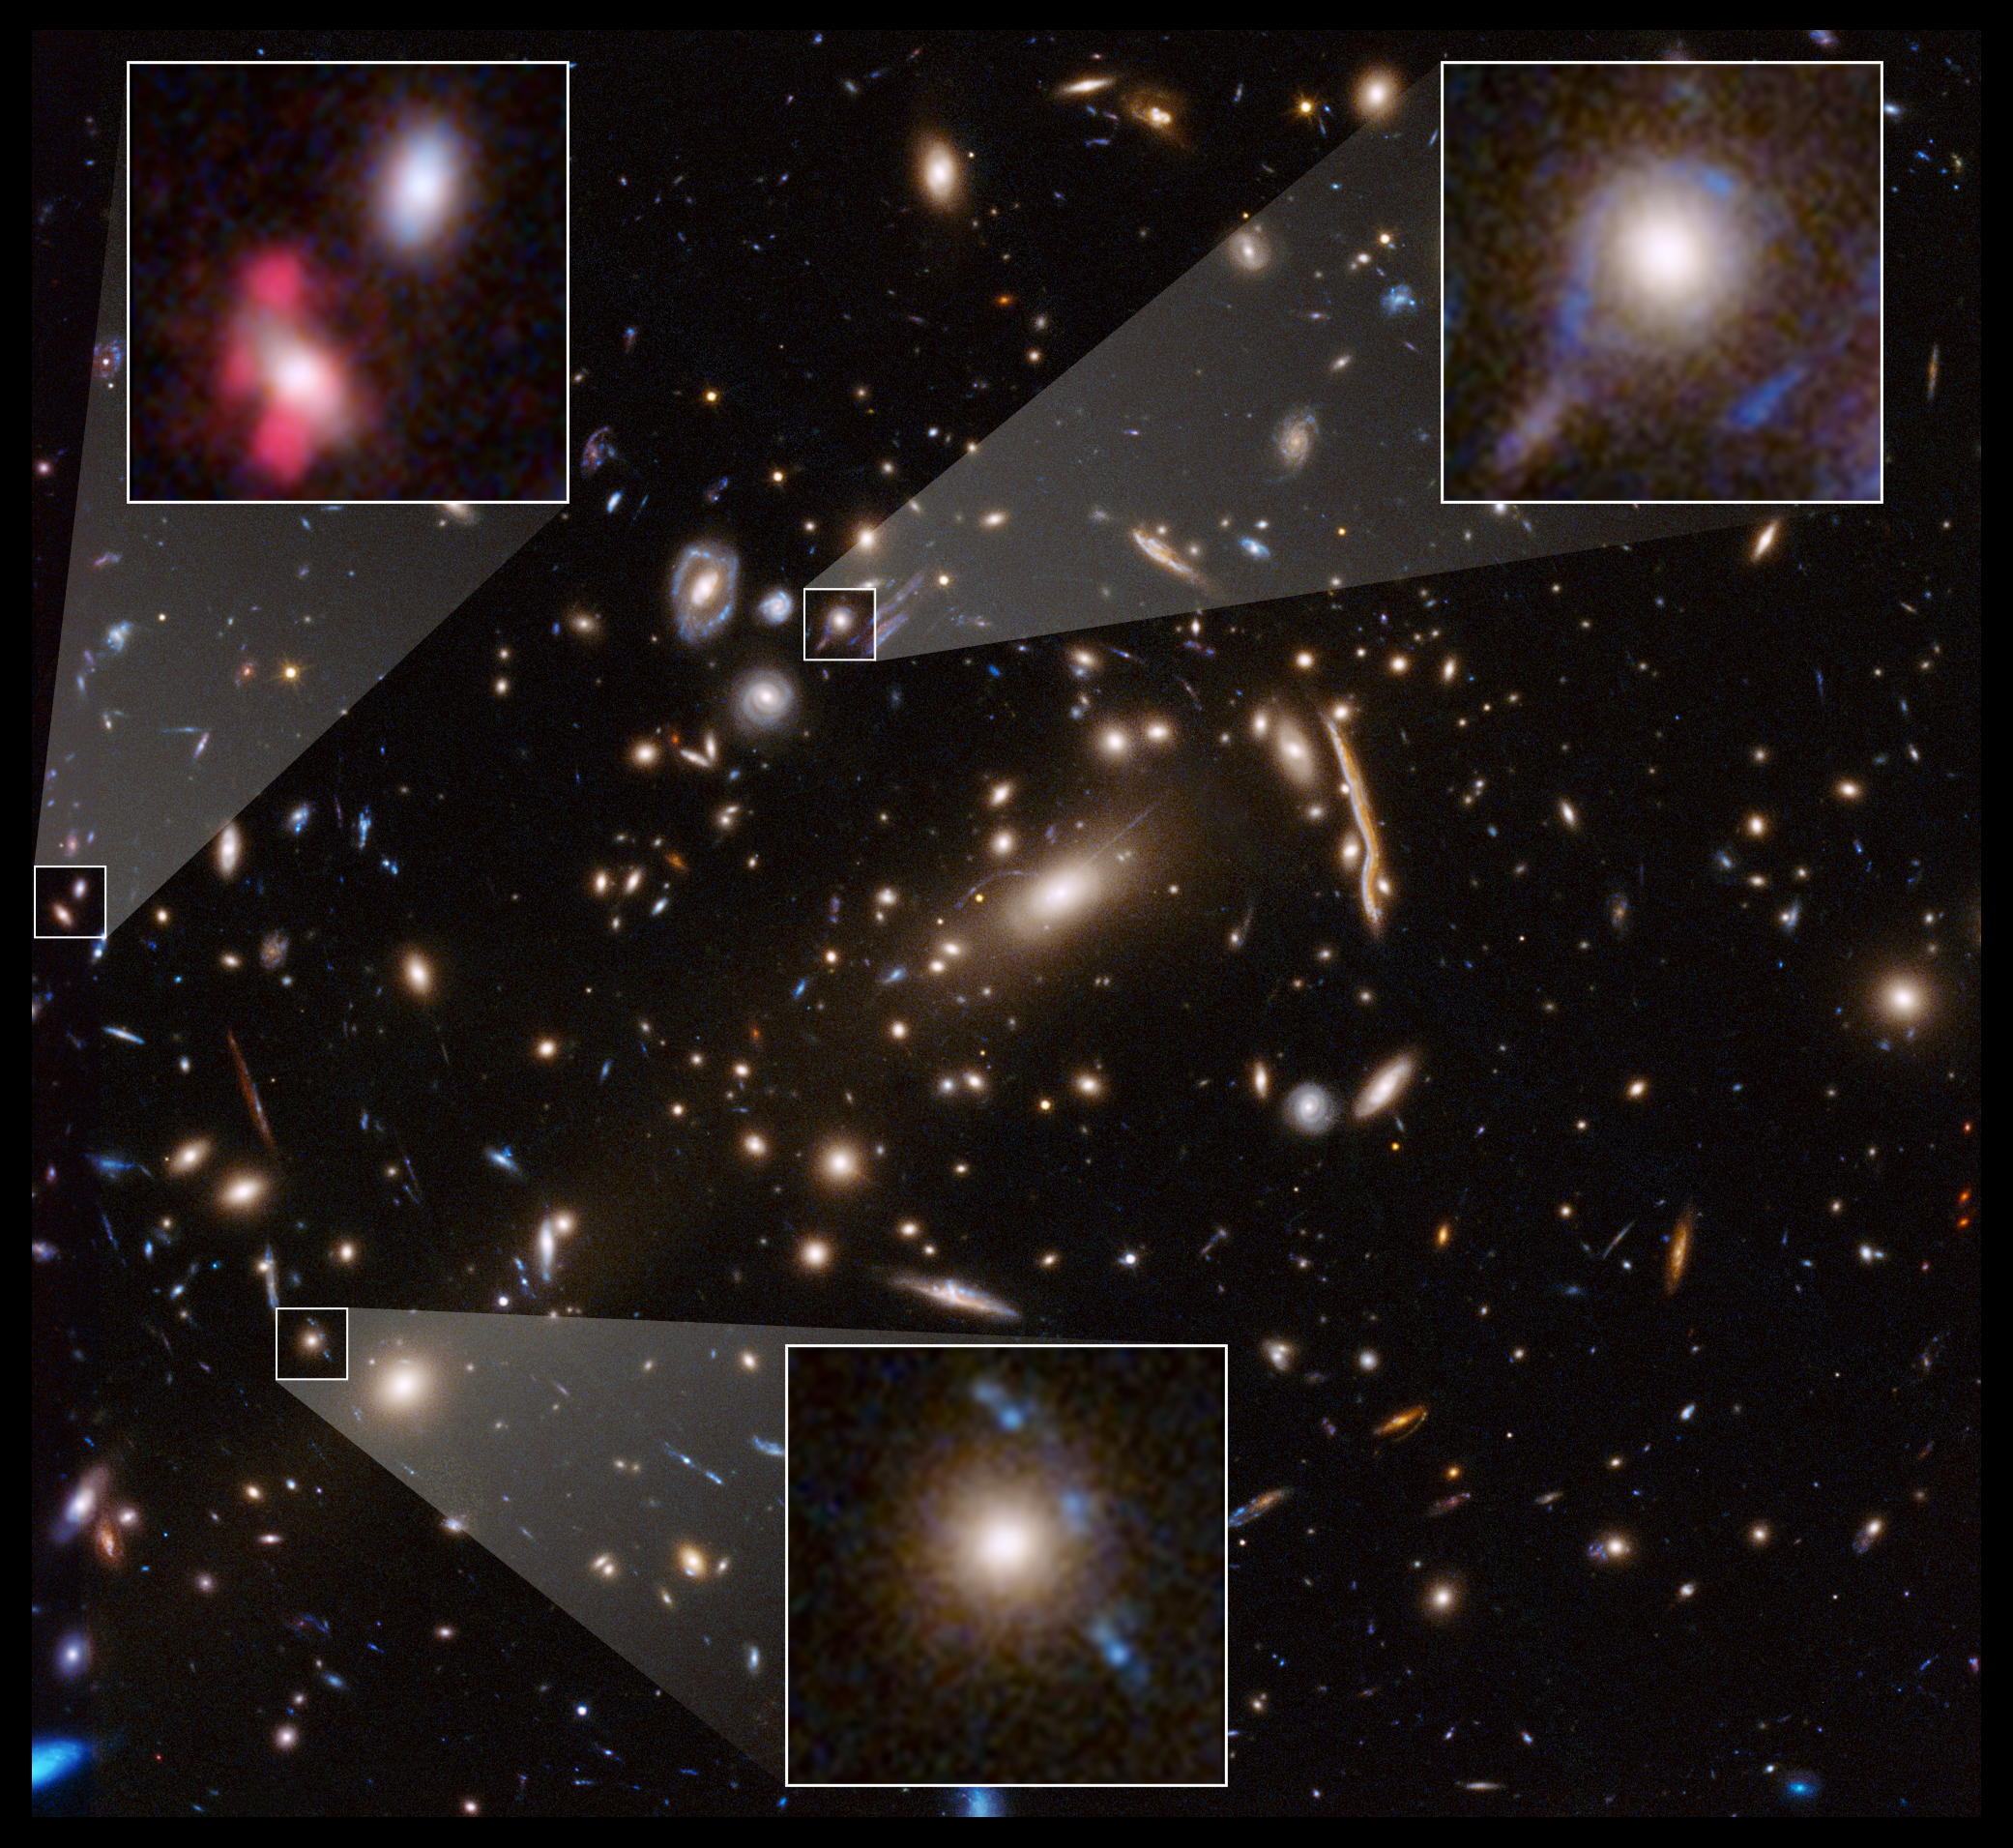

Hubble Examines the Galaxy Cluster MACSJ 1206

This Hubble Space Telescope image shows the massive galaxy cluster MACSJ 1206. Embedded within the cluster are the distorted images of distant background galaxies, seen as arcs and smeared features. These distortions are caused by the dark matter in the cluster, whose gravity bends and magnifies the light from faraway galaxies, an effect called gravitational lensing. This phenomenon allows astronomers to study remote galaxies that would otherwise be too faint to see.

Astronomers measured the amount of gravitational lensing caused by this cluster to produce a detailed map of the distribution of dark matter in it. Dark matter is the invisible glue that keeps stars bound together inside a galaxy and makes up the bulk of the matter in the Universe.

The Hubble image is a combination of visible- and infrared-light observations taken in 2011 by the Advanced Camera for Surveys and Wide Field Camera 3.

Credit: NASA, ESA, G. Caminha (University of Groningen), M. Meneghetti (Observatory of Astrophysics and Space Science of Bologna), P. Natarajan (Yale University), and the CLASH team.